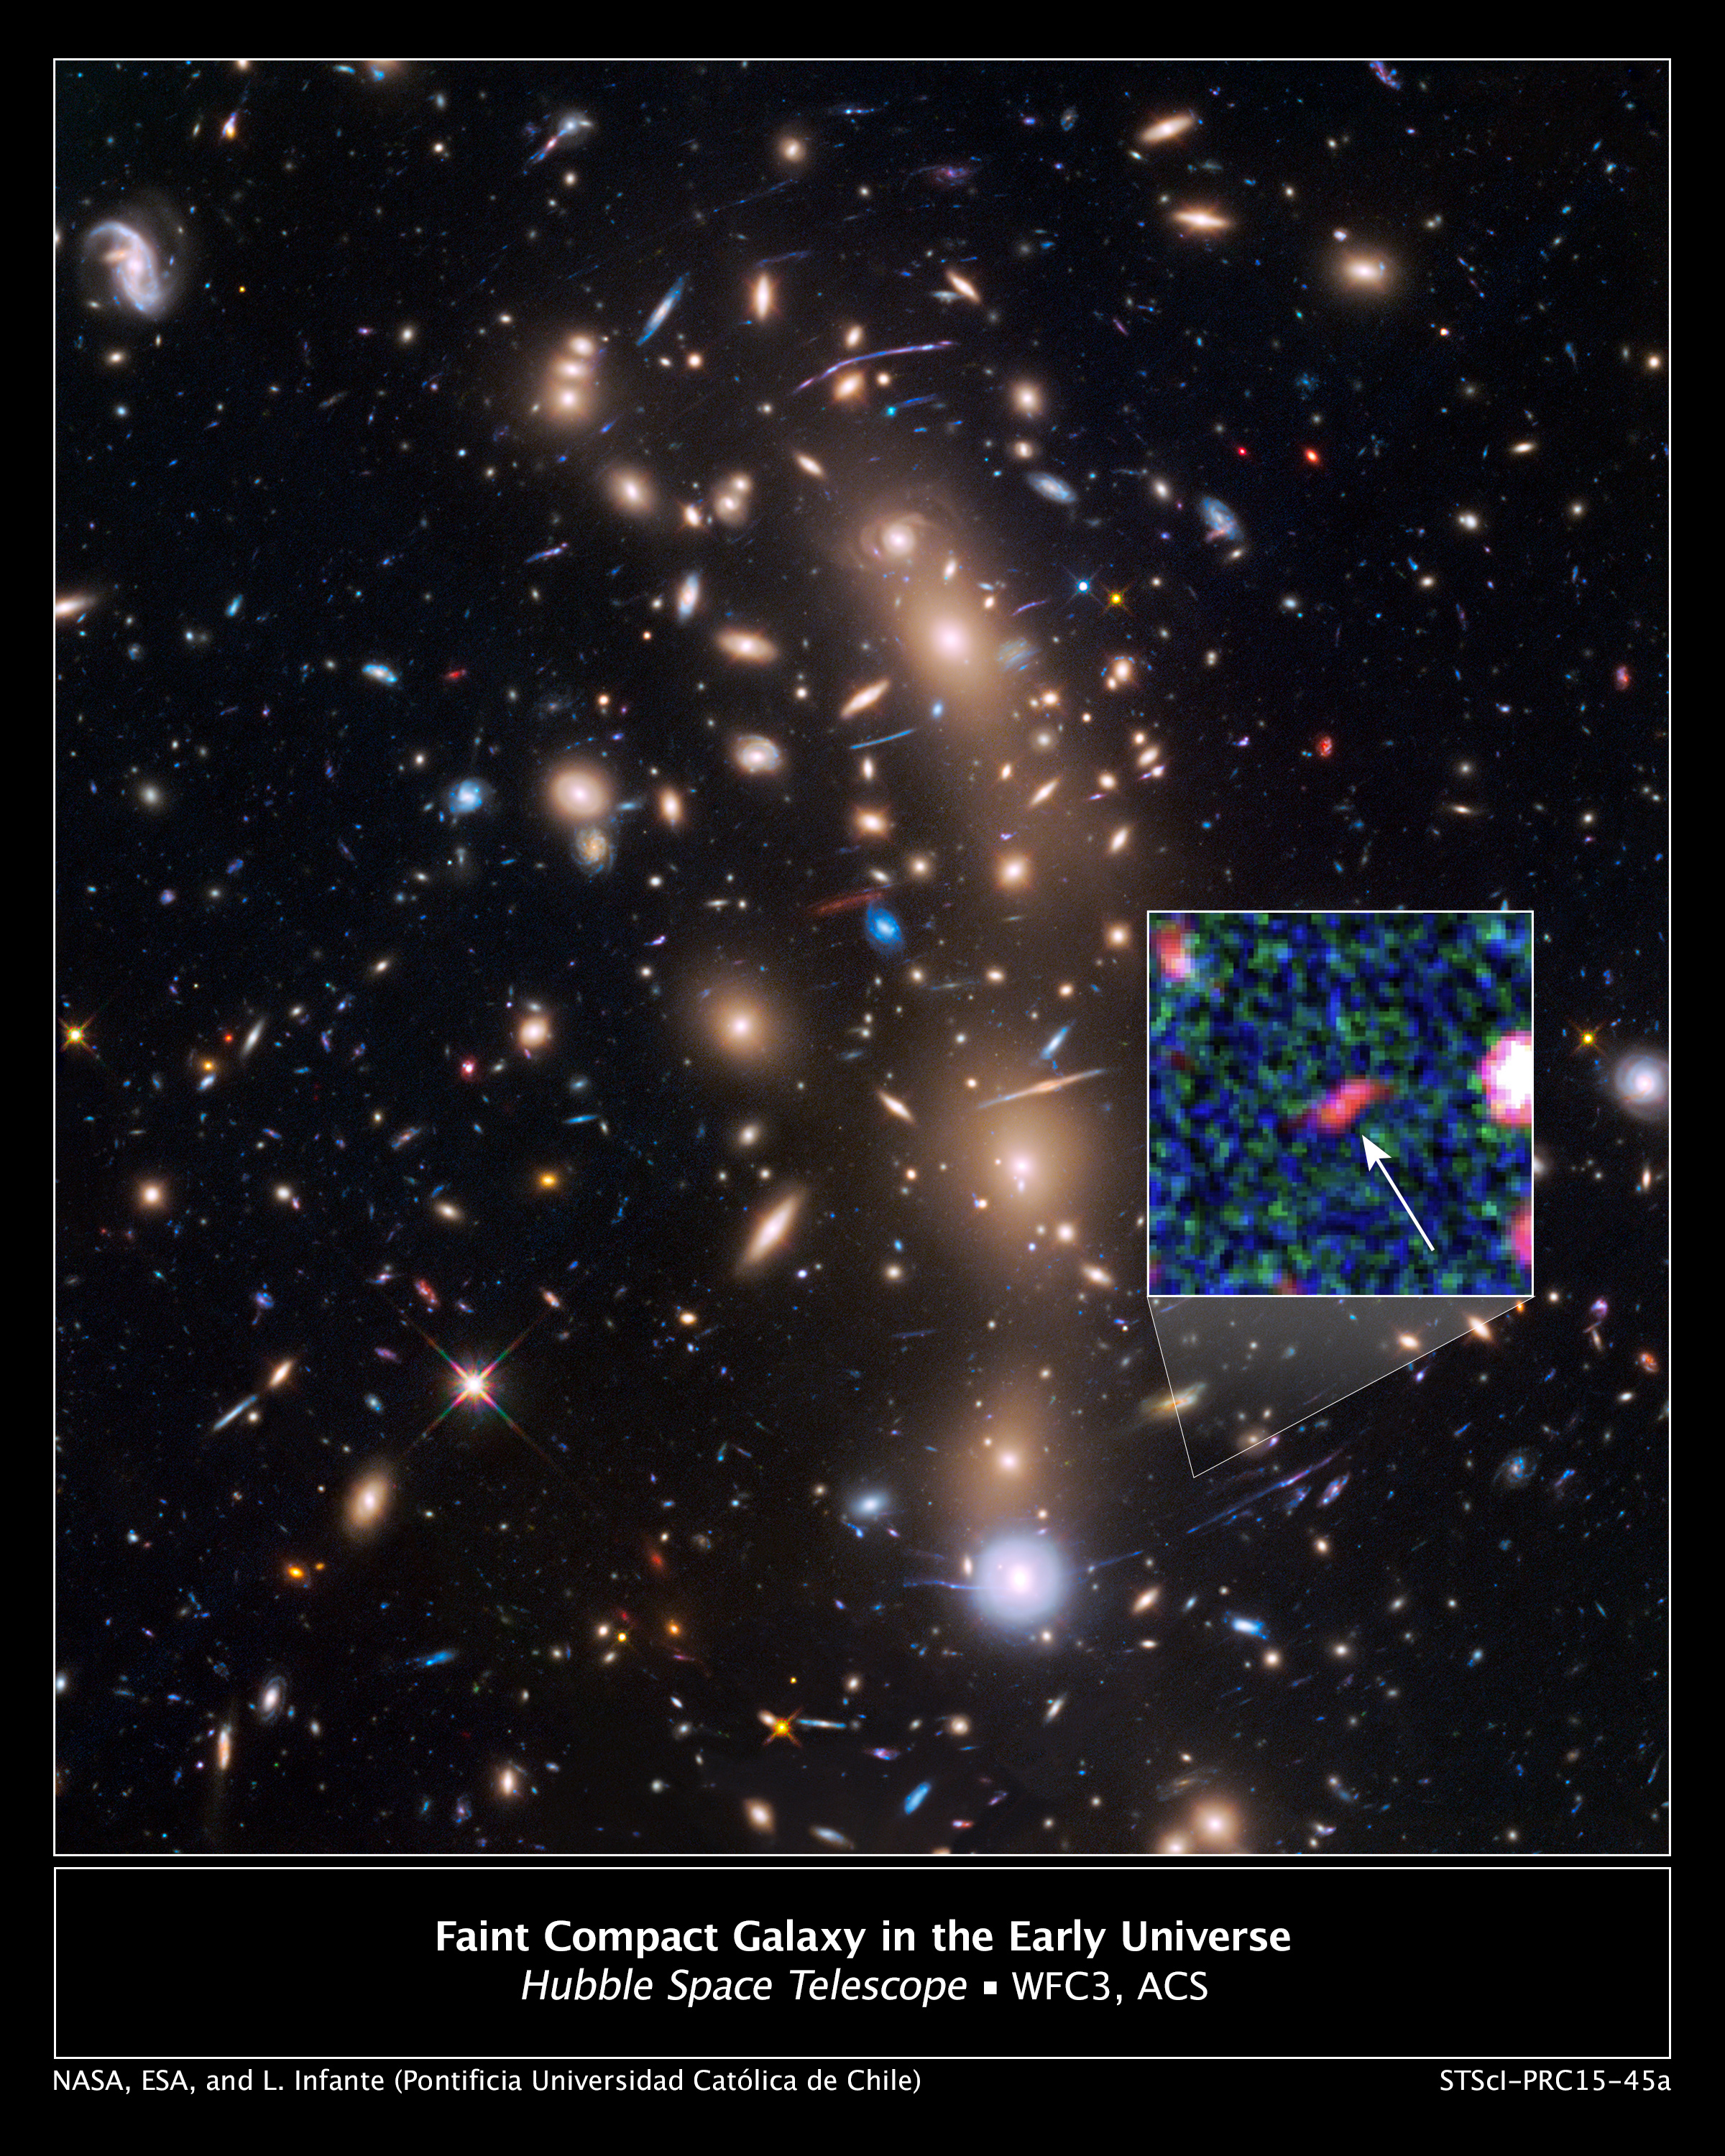

Faint compact galaxy in the early Universe

This is a NASA/ESA Hubble Space Telescope view of a very massive cluster of galaxies, MACS0416.1-2403, located roughly 4 billion light-years away and weighing as much as a million billion suns. The cluster’s immense gravitational field magnifies the image of galaxies far behind it, in a phenomenon called gravitational lensing.

The inset is an image of an extremely faint and distant galaxy that existed only 400 million years after the Big Bang. Hubble captured it because the gravitational lens makes the galaxy appear 20 times brighter than normal. The object is comparable in size to the Large Magellanic Cloud (LMC), a diminutive satellite galaxy of our Milky Way. It is rapidly making stars at a rate ten times faster than the LMC. The object might be the growing core of what was to eventually evolve into a full-sized galaxy. The research team has nicknamed the object Tayna, which means “first-born” in Aimara, a language spoken in the Andes and Altiplano regions of South America.

Credit: NASA, ESA, L. Infante (Pontificia Universidad Católica de Chile)